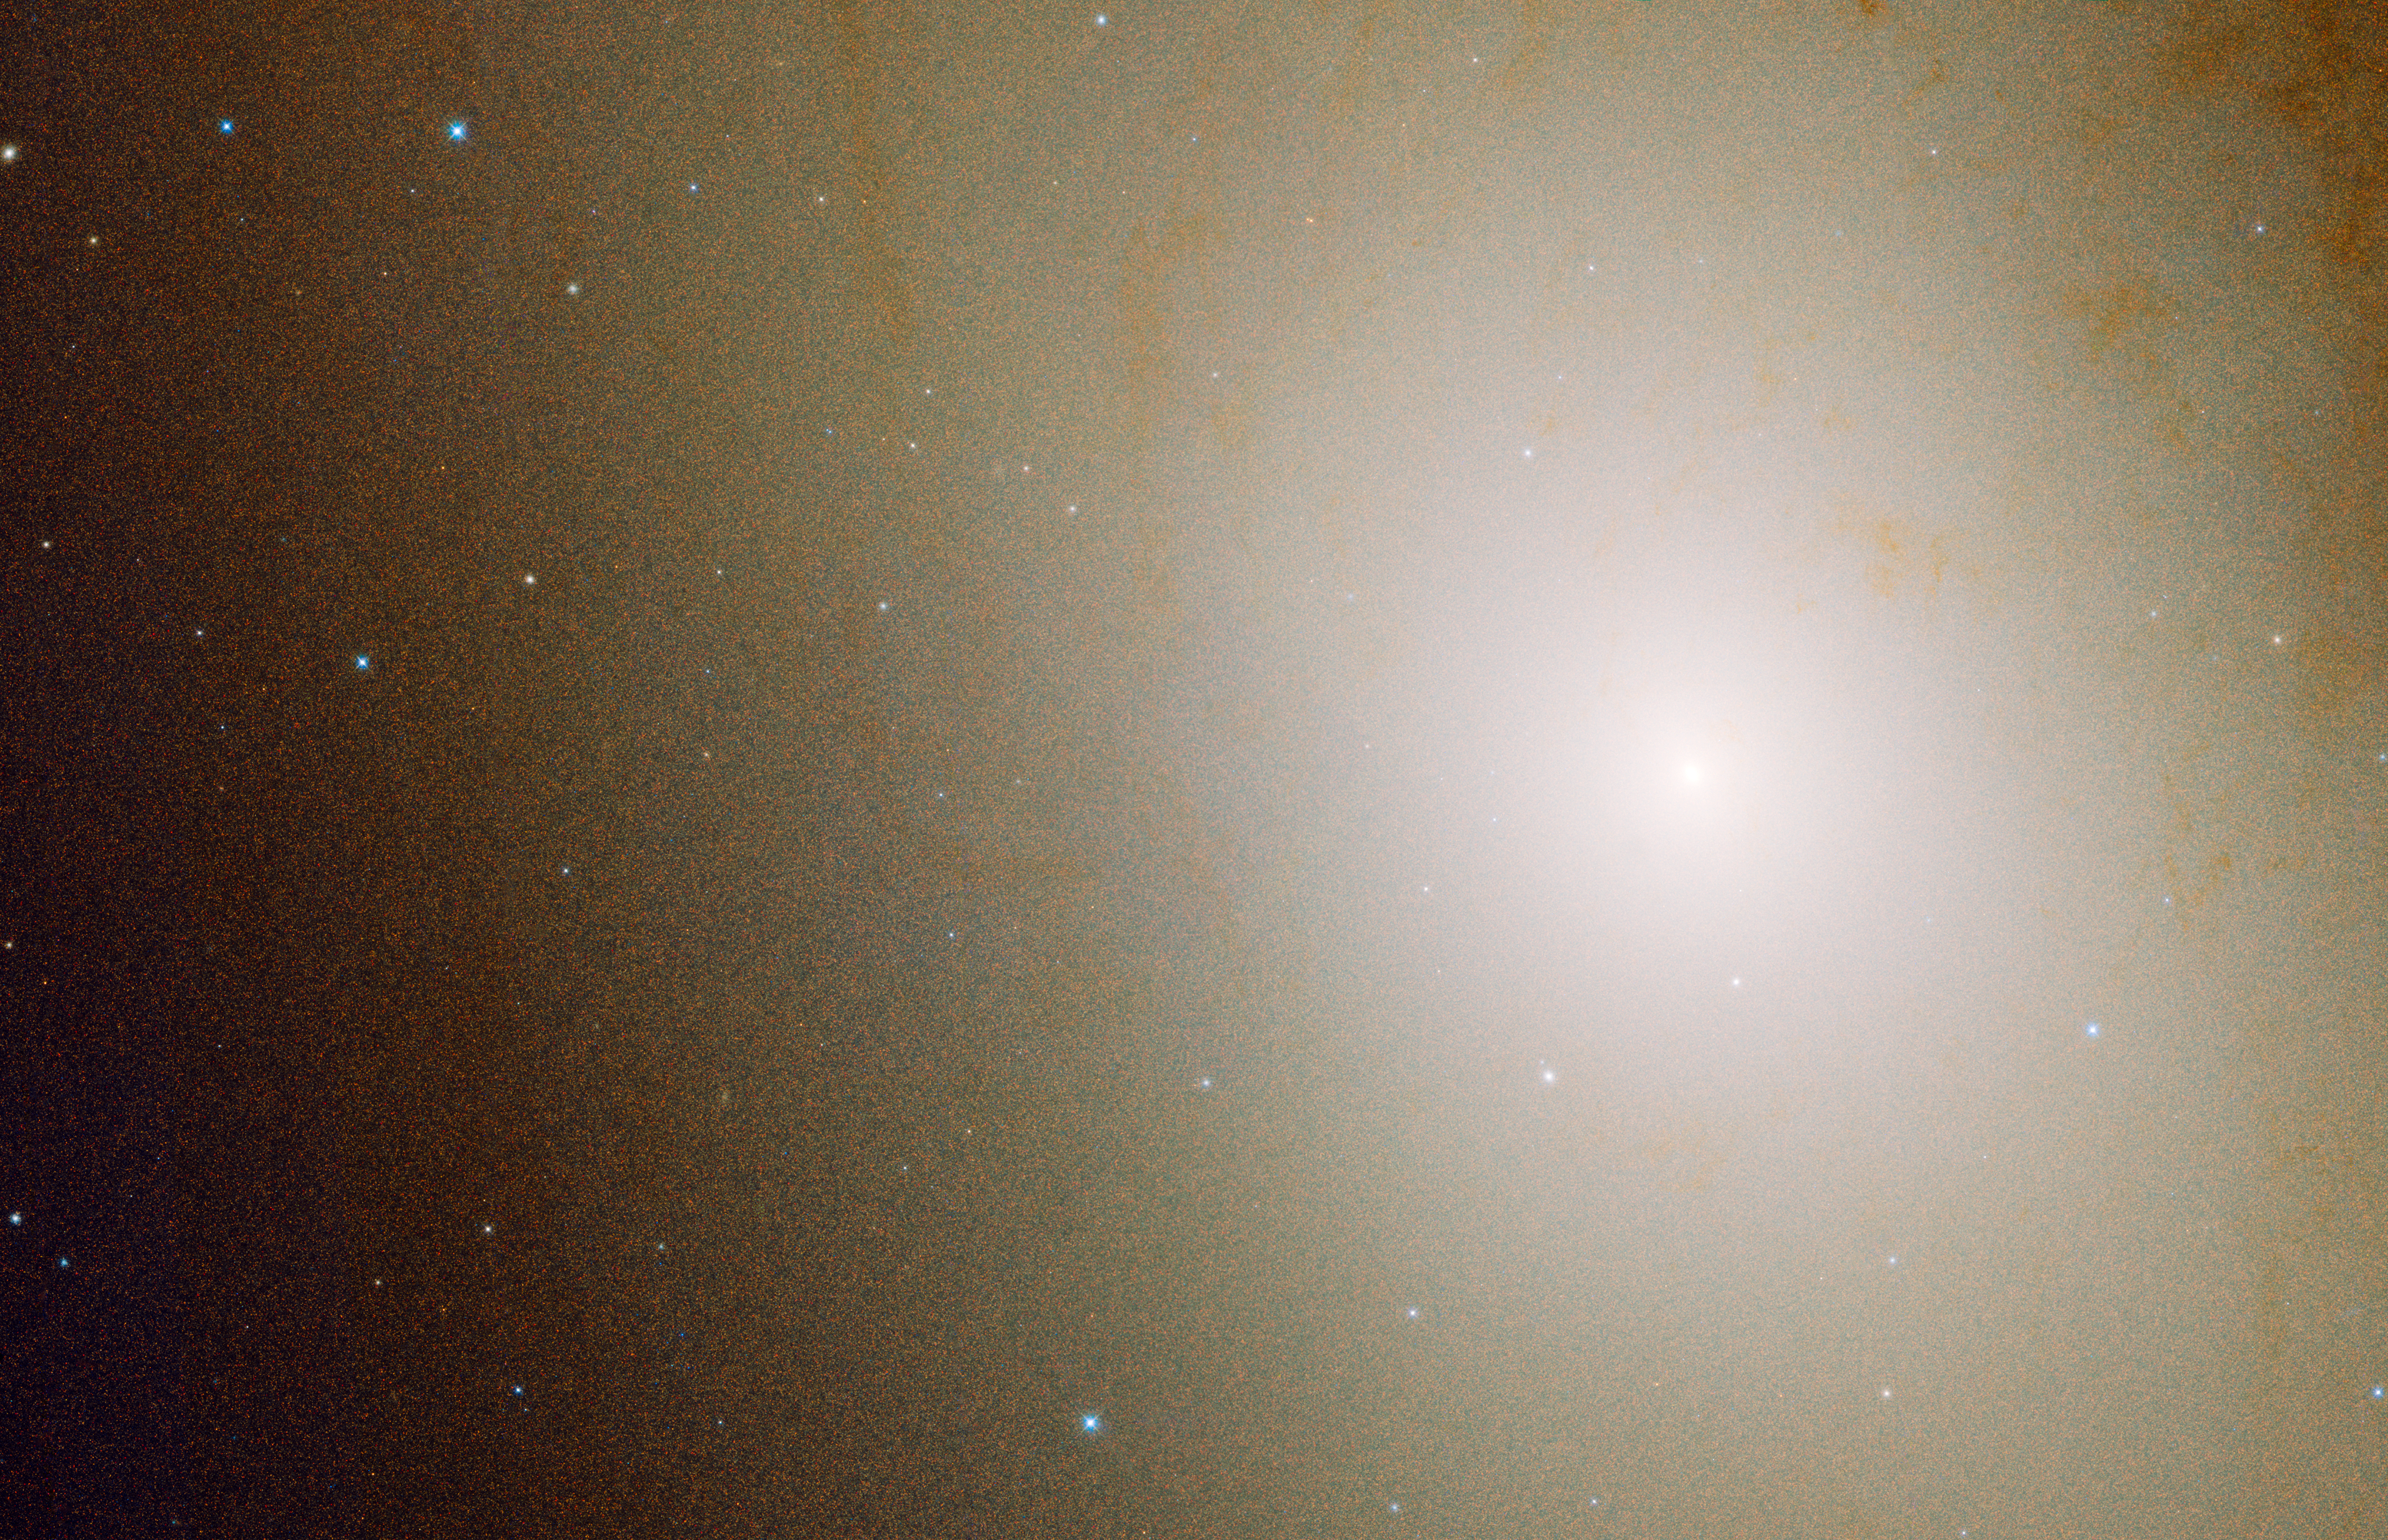

HST PHAT wide image of M31

This image is 7,900 light-years across and reveals the Andromeda galaxy's crowded central region. The bright area near the centre of the image is a grouping of stars nestled around the galaxy's black hole. The blue dots sprinkled throughout the image are ultra-blue stars whose population increases around the crowded hub. The blue stars are old Sun-like stars that have prematurely cast off their outer layers of material, exposing their extremely blue-hot cores.

Credit: NASA, ESA, and B. Williams and J. Dalcanton (University of Washington, Seattle)